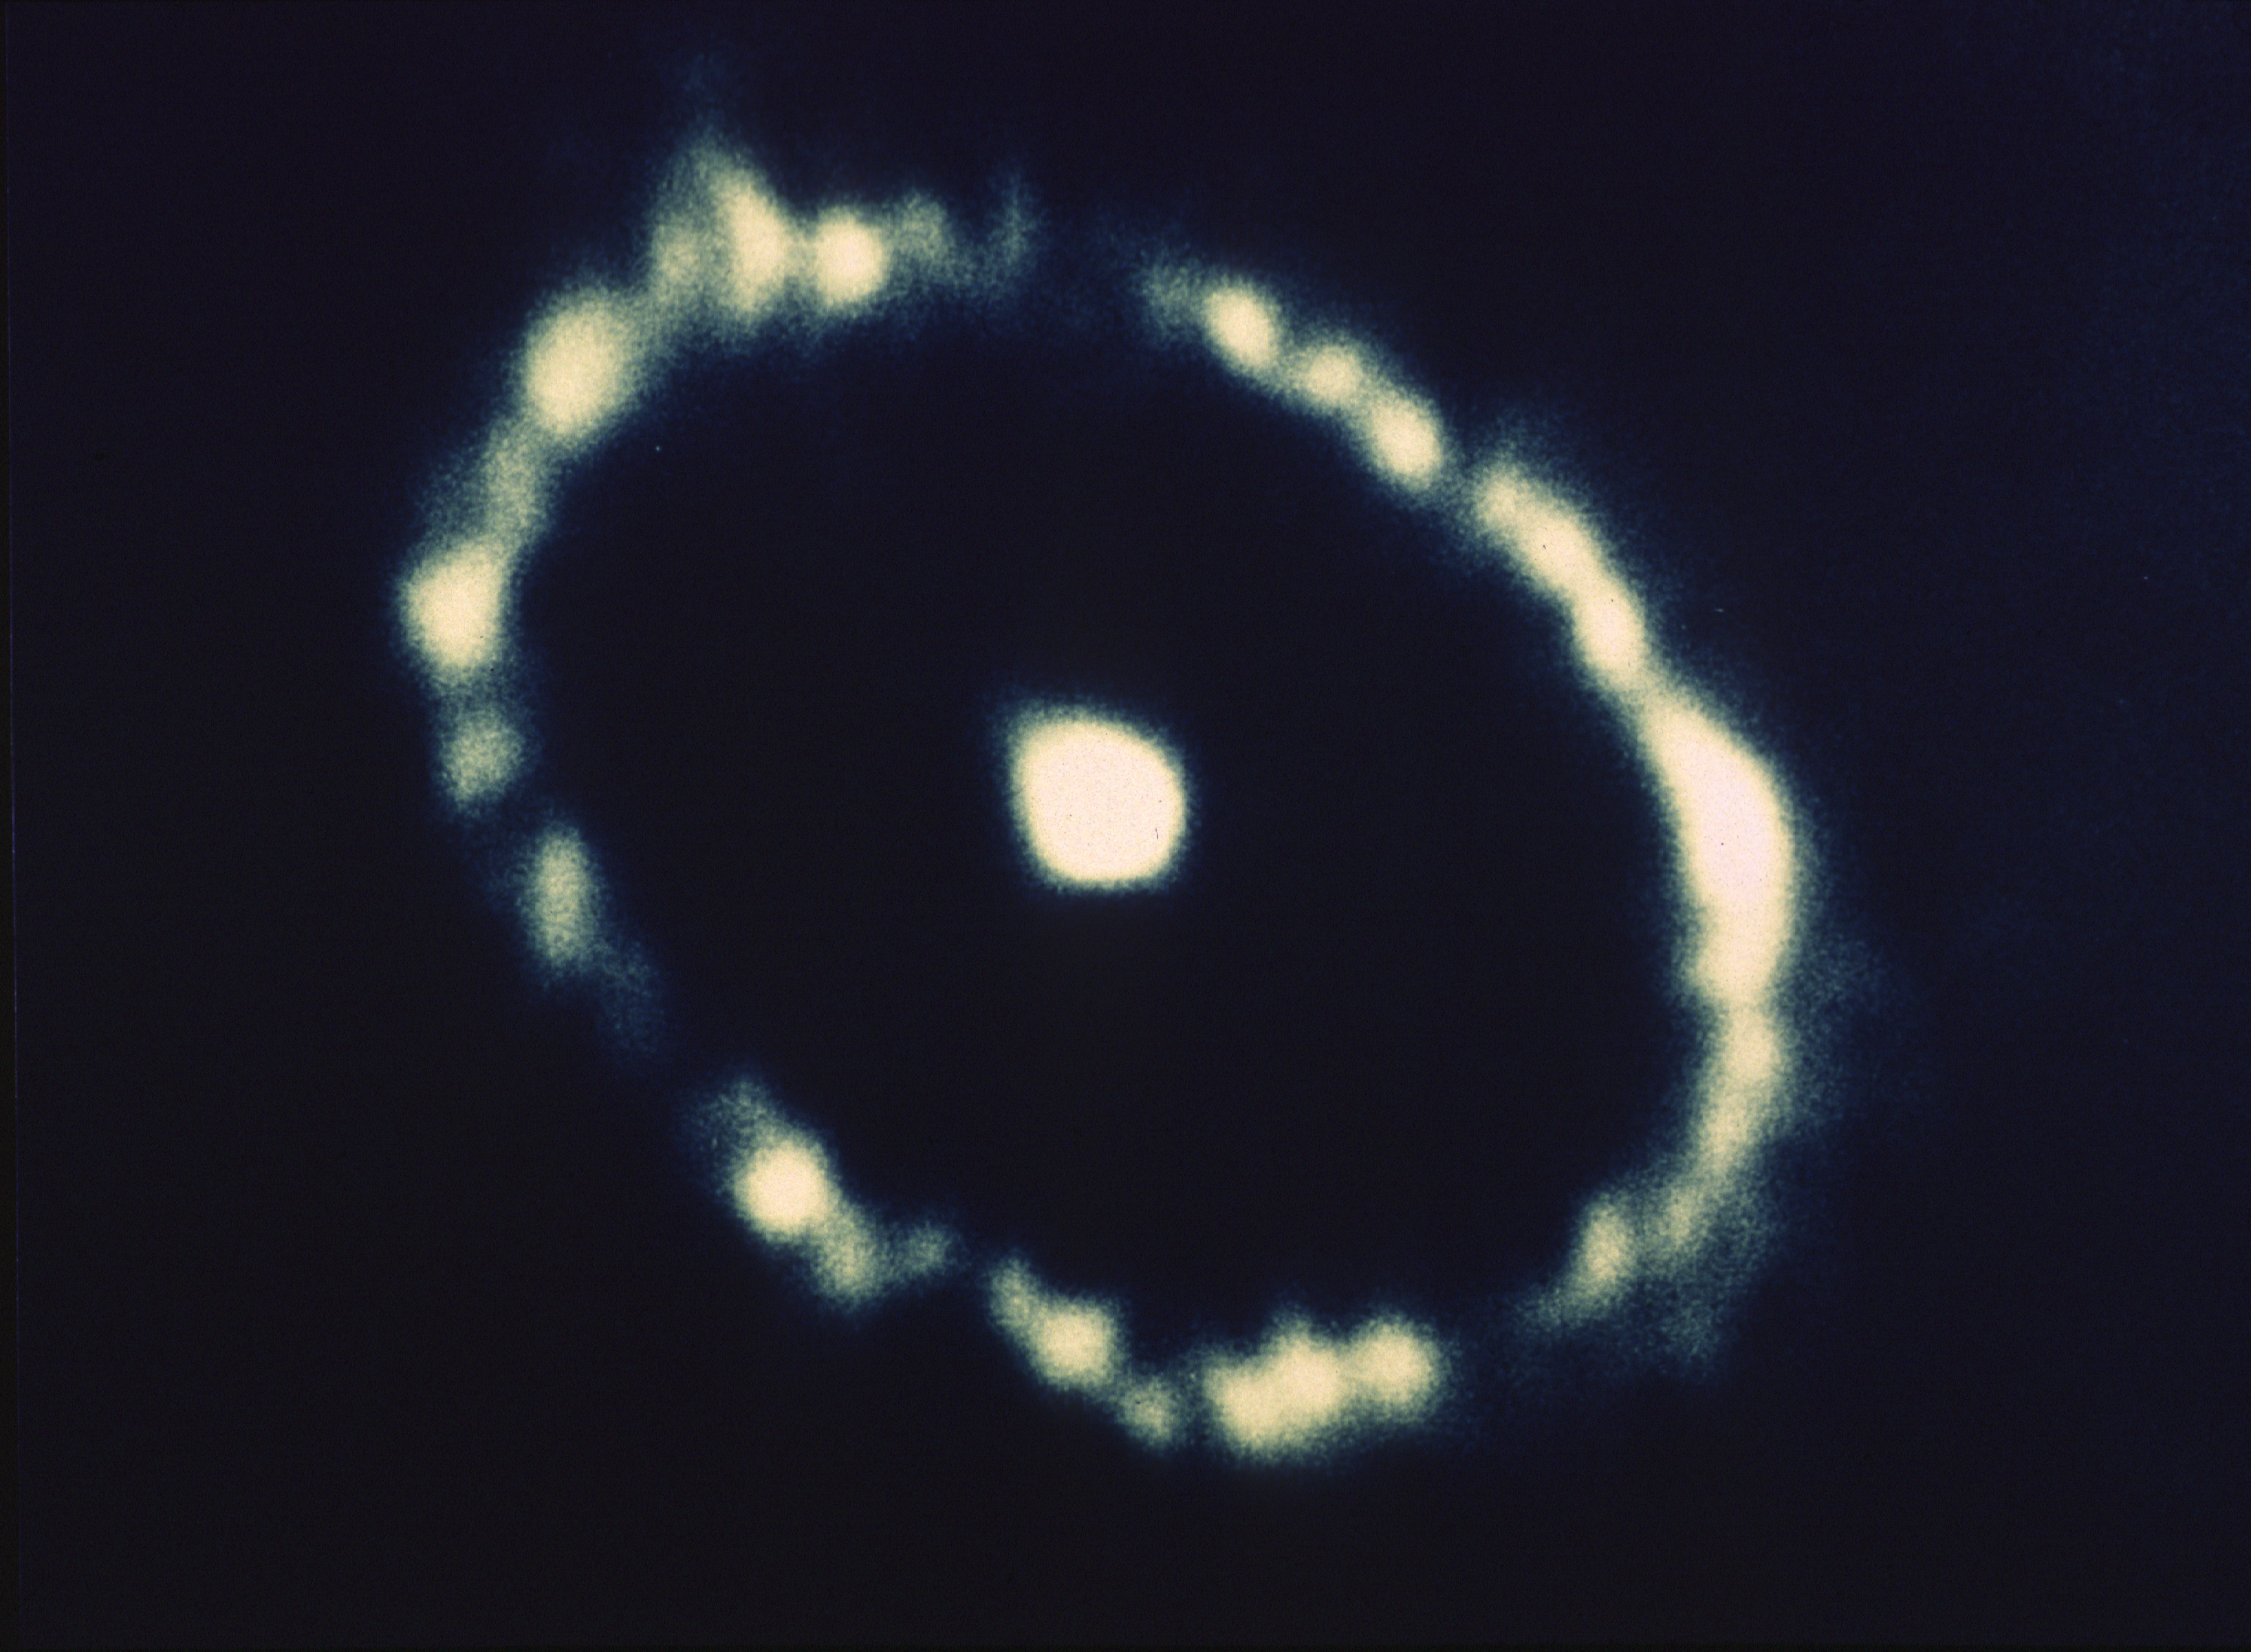

SN1987A

A NASA/ESA Hubble Space Telescope image of a gaseous ring surrounding the supernova 1987A, which exploded on February 23, 1987 in the Large Magellanic Cloud, an irregular satellite galaxy of the Milky Way.

In this image, taken with the European Space Agency’s Faint Object Camera (FOC), HST’s 0.07 are second resolution reveals clumpy structure in the ring which indicates that the material is not uniformly distributed.

Credit: NASA and ESA